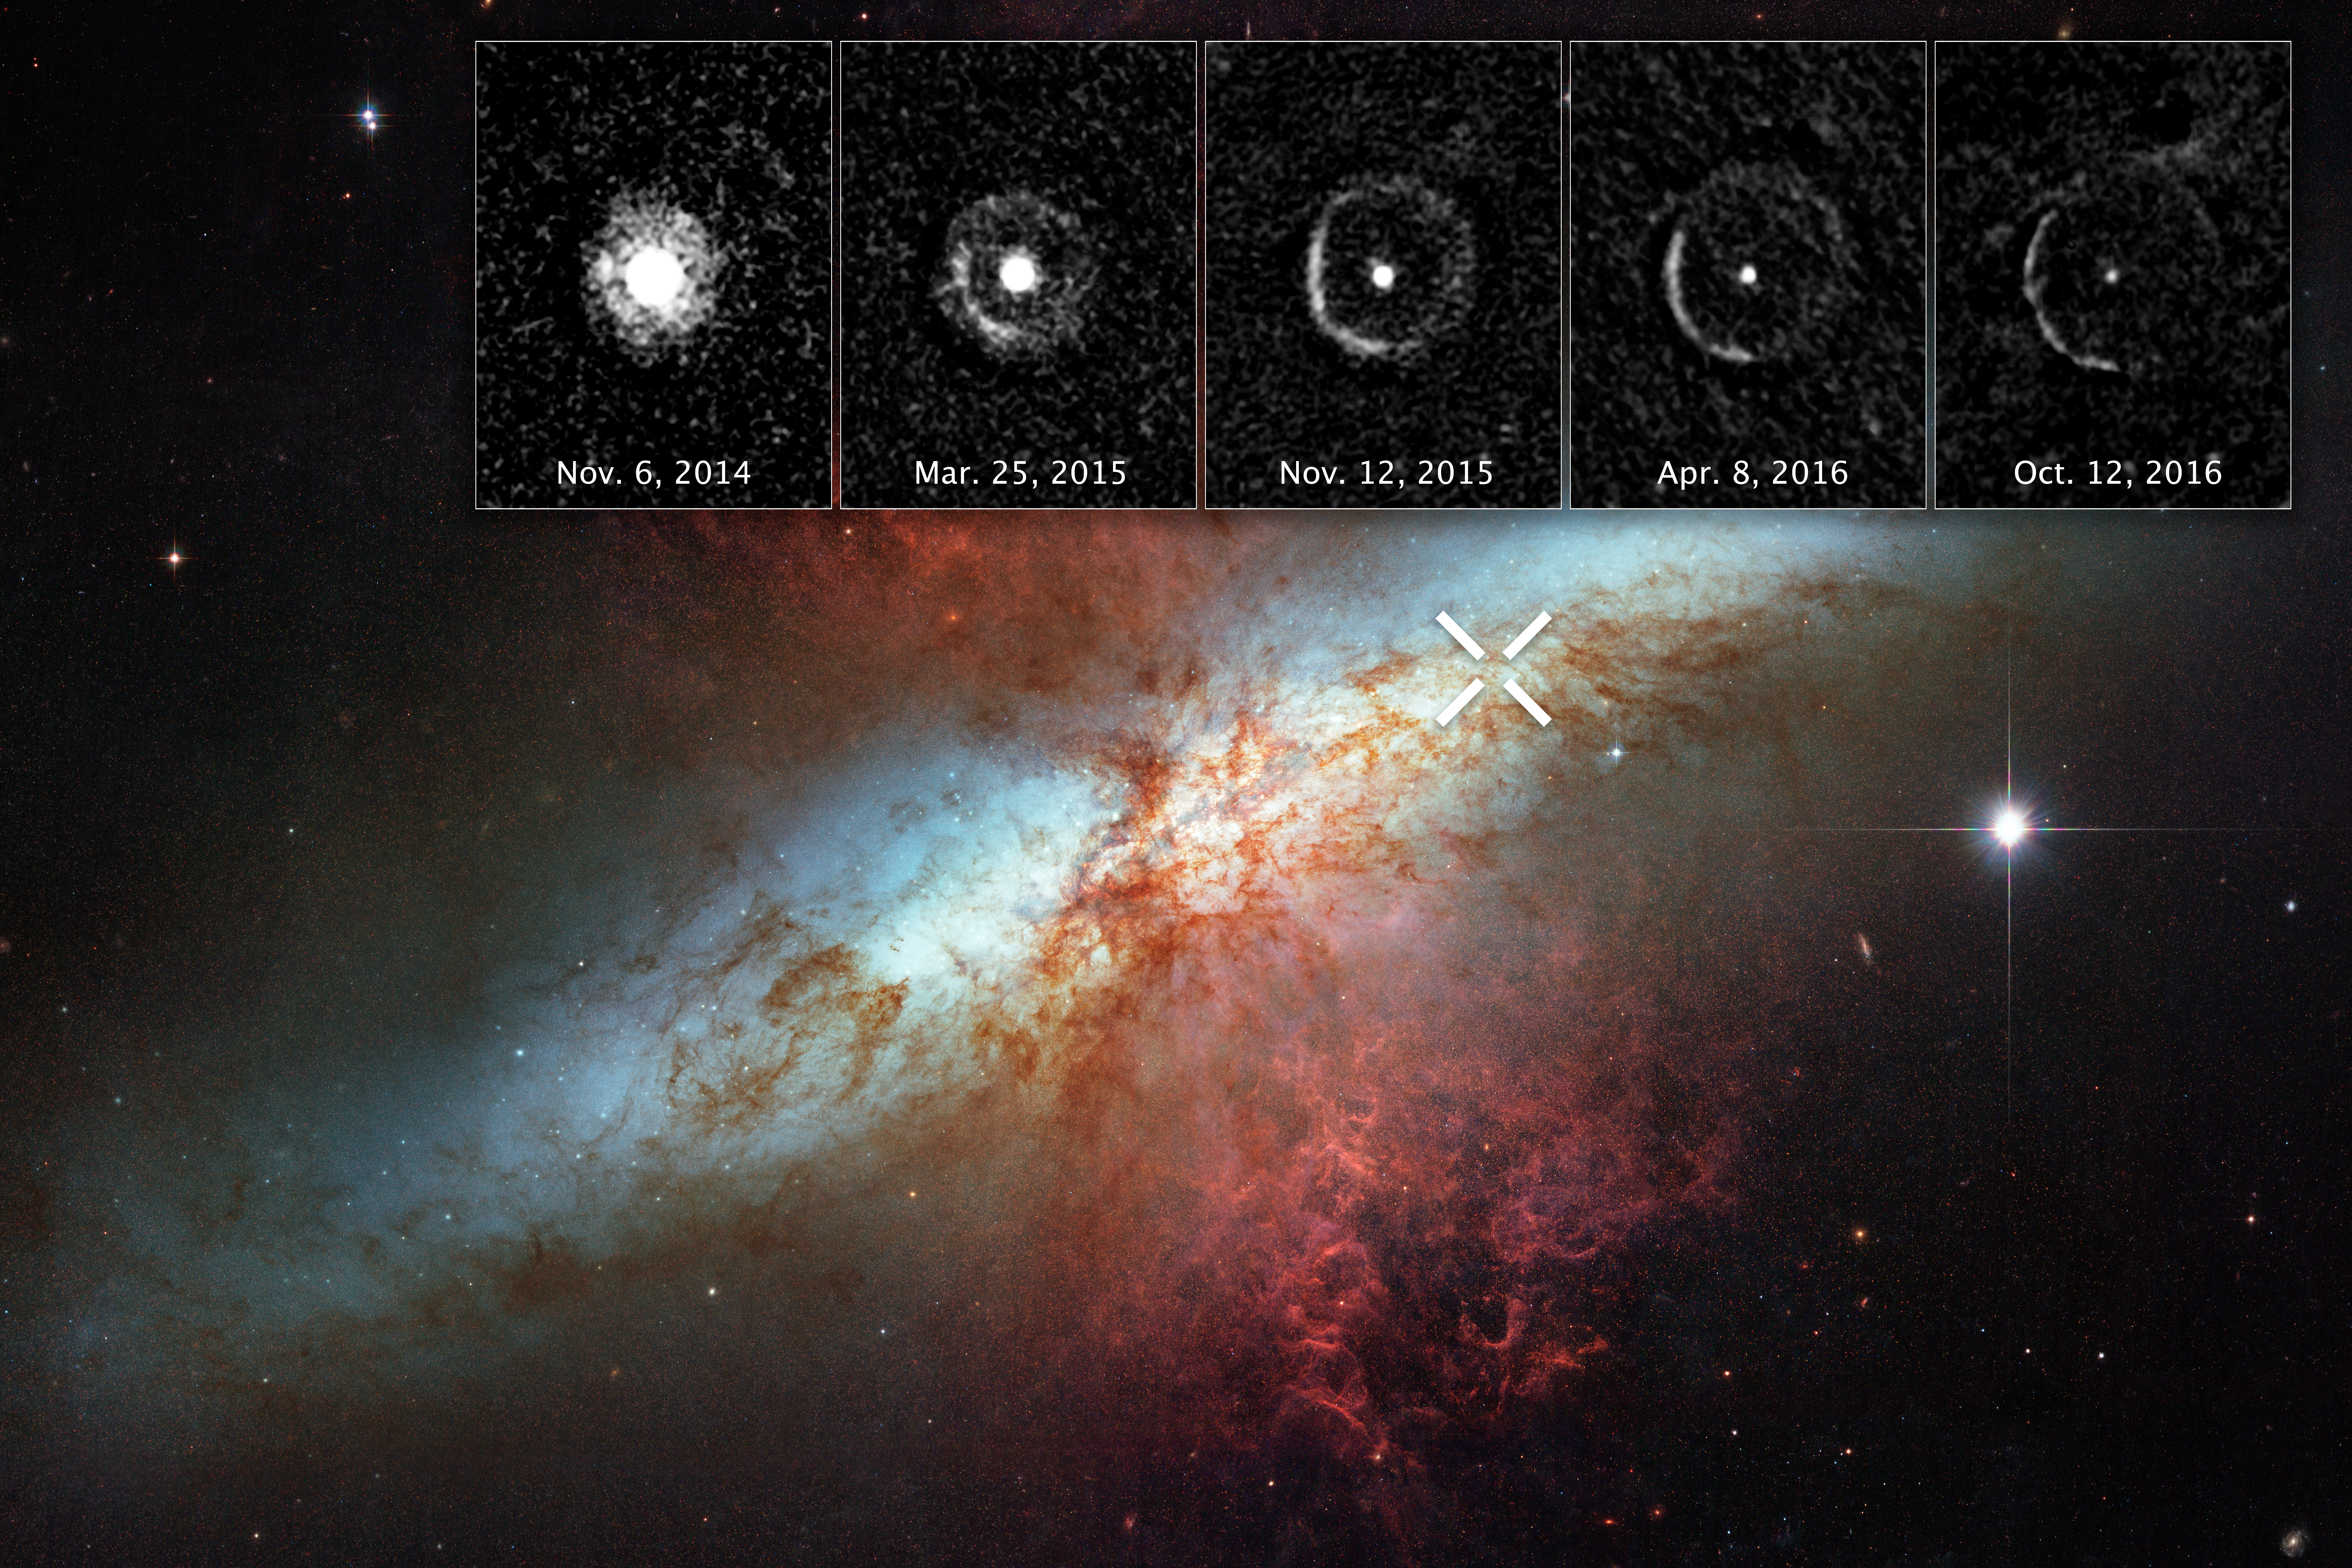

Light Echo around SN 2014J in M82

Light from a supernova explosion in the nearby starburst galaxy Messier 82 is reverberating off a huge dust cloud in interstellar space. The supernova, called SN 2014J, occurred at the upper right of Messier 82, and is marked by an “X.” The supernova was discovered on 21 January 2014.

The inset images at the top reveal an expanding shell of light from the stellar explosion sweeping through interstellar space, called a “light echo.” The images were taken 10 months to nearly two years after the violent event (6 November 2014 to 12 October 2016). The light is bouncing off a giant dust cloud that extends 300 to 1600 light-years from the supernova and is being reflected toward Earth.

SN 2014J is classified as a Type Ia supernova and is the closest such blast in at least four decades. A Type Ia supernova occurs in a binary star system consisting of a burned-out white dwarf and a companion star. The white dwarf explodes after the companion dumps too much material onto it.

The image of Messier 82 reveals a bright blue disc, webs of shredded clouds, and fiery-looking plumes of glowing hydrogen blasting out of its central regions. Close encounters with its larger neighbor, the spiral galaxy Messier 81, is compressing gas in Messier 82 and stoking the birth of multiple star clusters. Some of these stars live for only a short time and die in cataclysmic supernova blasts, as shown by SN 2014J.

Located about 11 million light-years away, Messier 82 appears high in the constellation Ursa Major, the Great Bear. It is also called the “Cigar Galaxy” because of the elliptical shape produced by the oblique tilt of its starry disk relative to our line of sight.

The Messier 82 image was taken in 2006 using the Advanced Camera for Surveys. The inset images of the light echo also were taken by the Advanced Camera for Surveys.

Credit: NASA, ESA, and Y. Yang (Texas A&M University and Weizmann Institute of Science, Israel) Acknowledgment: M. Mountain (AURA) and The Hubble Heritage Team (STScI/AURA)